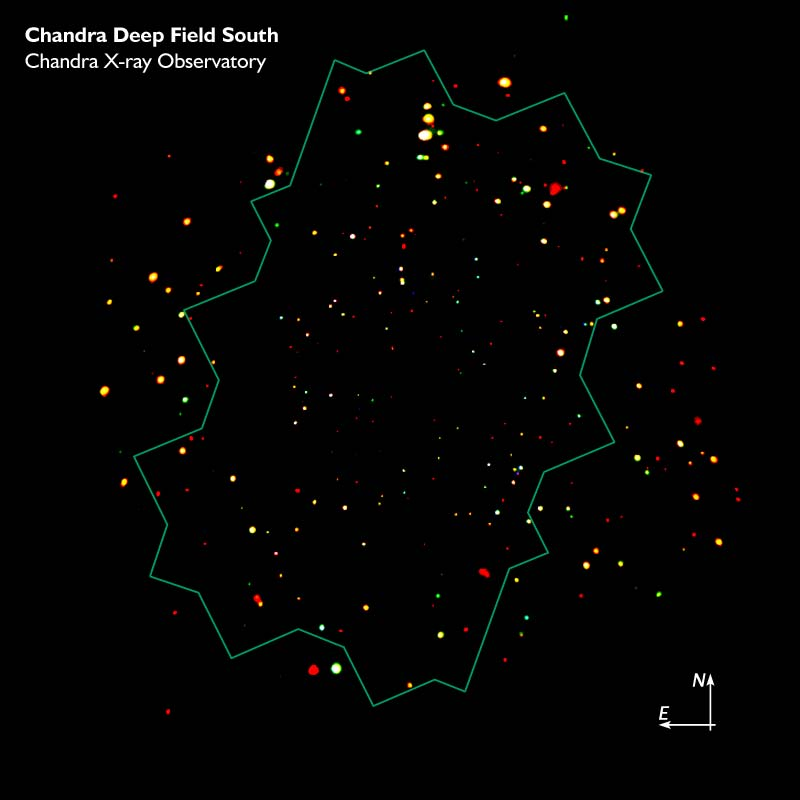

CDF-S CXO Image with Location of ACS Mosaic

The Chandra Deep Field South, showing the location of the ACS mosaic.

Credit: NASA, ESA, the Chandra Deep Field-South Team and Zolt Levay (STScI)